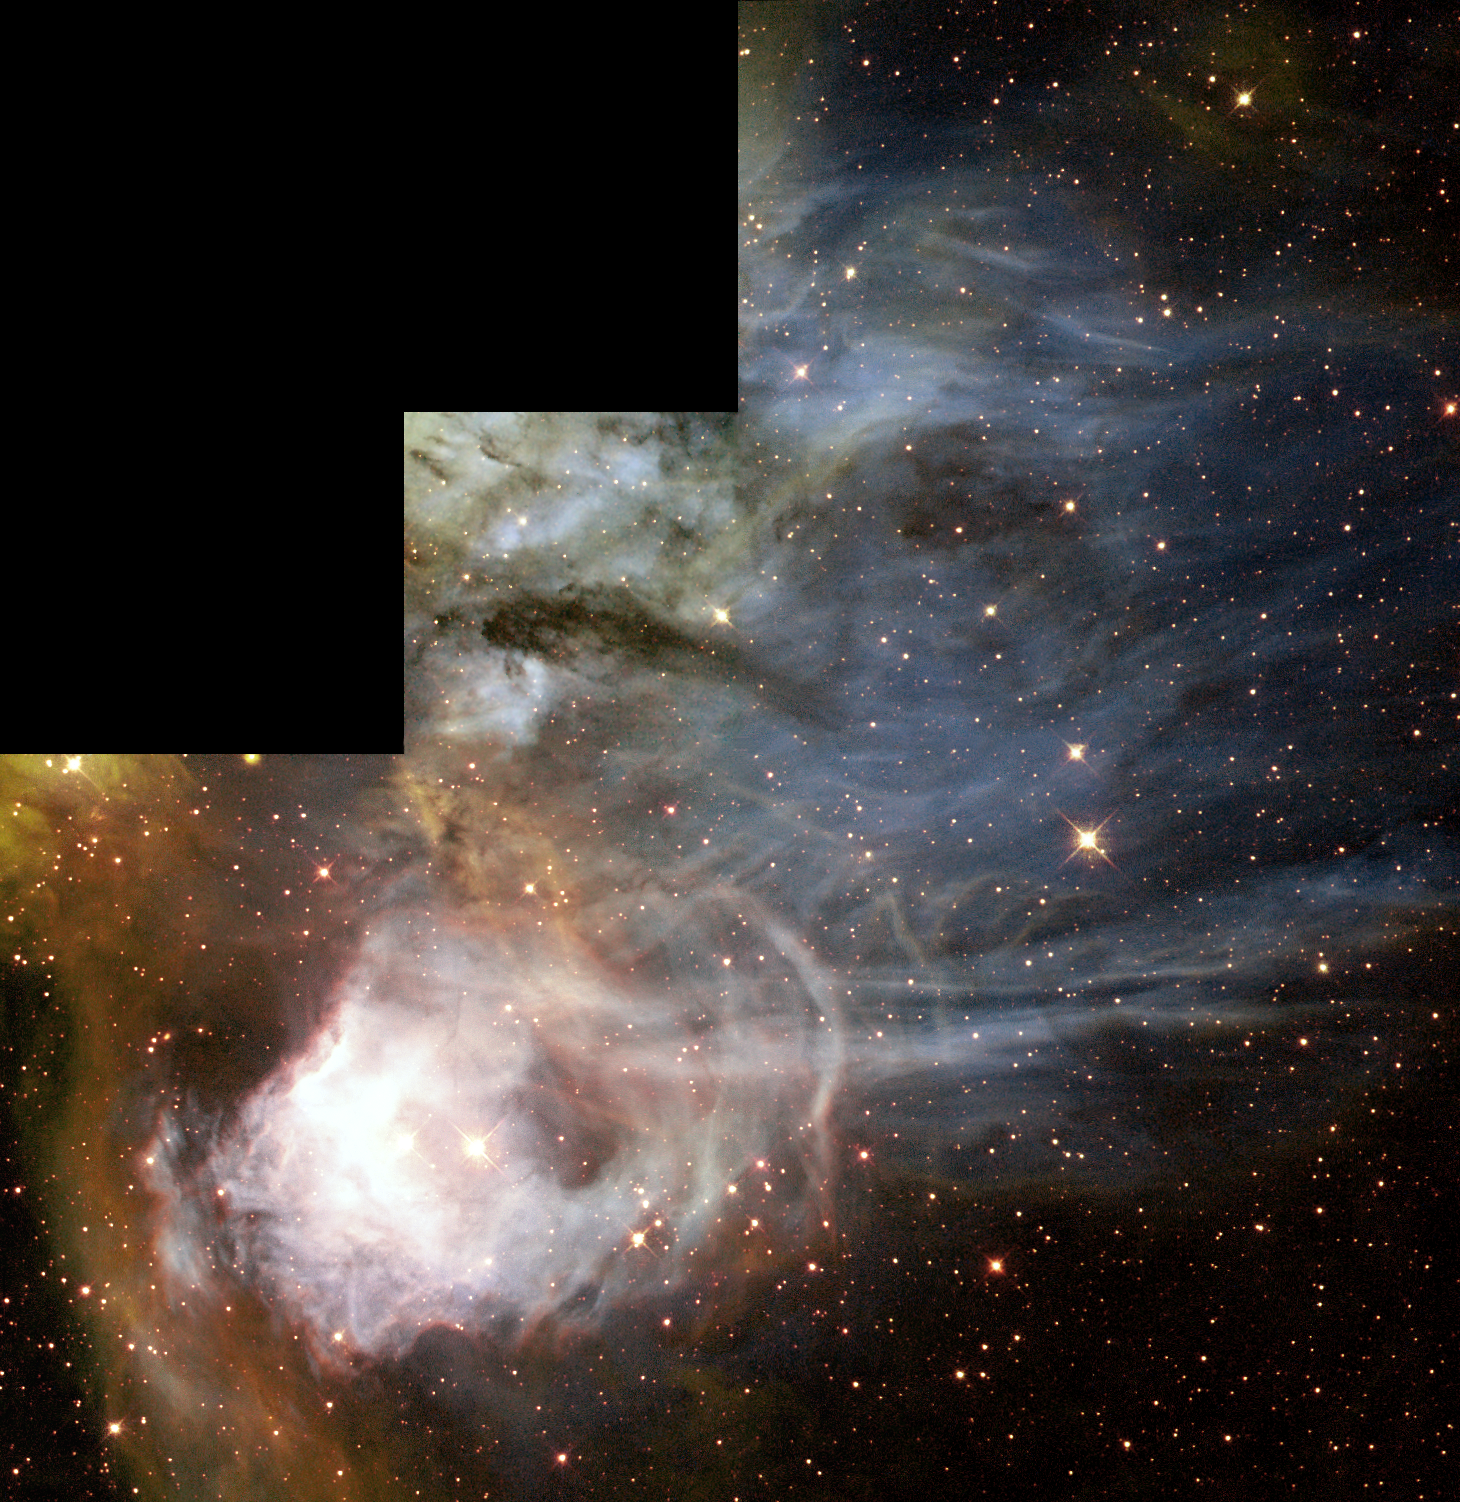

Gaseous streamers flutter in stellar breeze

N44C is the designation for a region of ionized hydrogen gas surrounding an association of young stars in the Large Magellanic Cloud (LMC), a nearby, small companion galaxy to the Milky Way visible from the Southern Hemisphere. N44C is part of the larger N44 complex, which includes young, hot, massive stars, nebulae, and a 'superbubble' blown out by multiple supernova explosions.

Credit: NASA/ESA and The Hubble Heritage Team